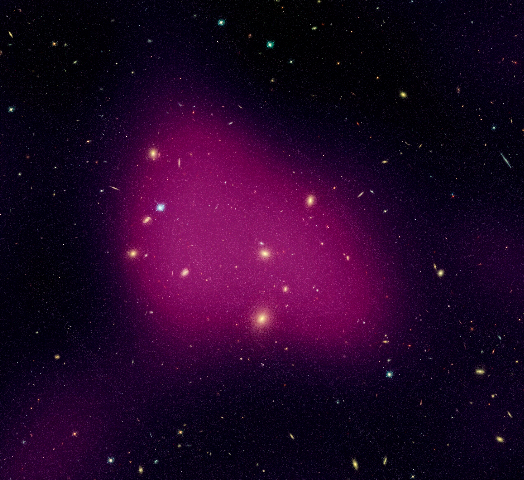

Hubble maps dark matter web in a large galaxy cluster (individual image 4)

A Hubble study pinpointed four main areas in the supercluster where dark matter has pooled into dense clumps. These areas match the location of hundreds of galaxies that have experienced a violent history in their passage from the outskirts of the supercluster into these dense regions. To make this image, astronomers superimposed the dark matter map over a Hubble visible-light image of the supercluster galaxies.

The image is part of the Space Telescope Abell 901/902 Galaxy Evolution Survey (STAGES), which covers one of the largest patches of sky ever observed by the Hubble telescope. The area surveyed is so wide that it took 80 Hubble images to cover the entire field.

Hubble's Advanced Camera for Surveys made the observations in June and July 2005 and in January 2006.

Credit for the Hubble images: NASA, ESA, C. Heymans (University of British Columbia, Vancouver), M. Gray (University of Nottingham, U.K.), M. Barden (Innsbruck), and the STAGES collaboration
Credit for the ground-based image: ESO, C. Wolf (Oxford University, U.K.), K. Meisenheimer (Max-Planck Institute for Astronomy, Heidelberg), and the COMBO-17 collaboration